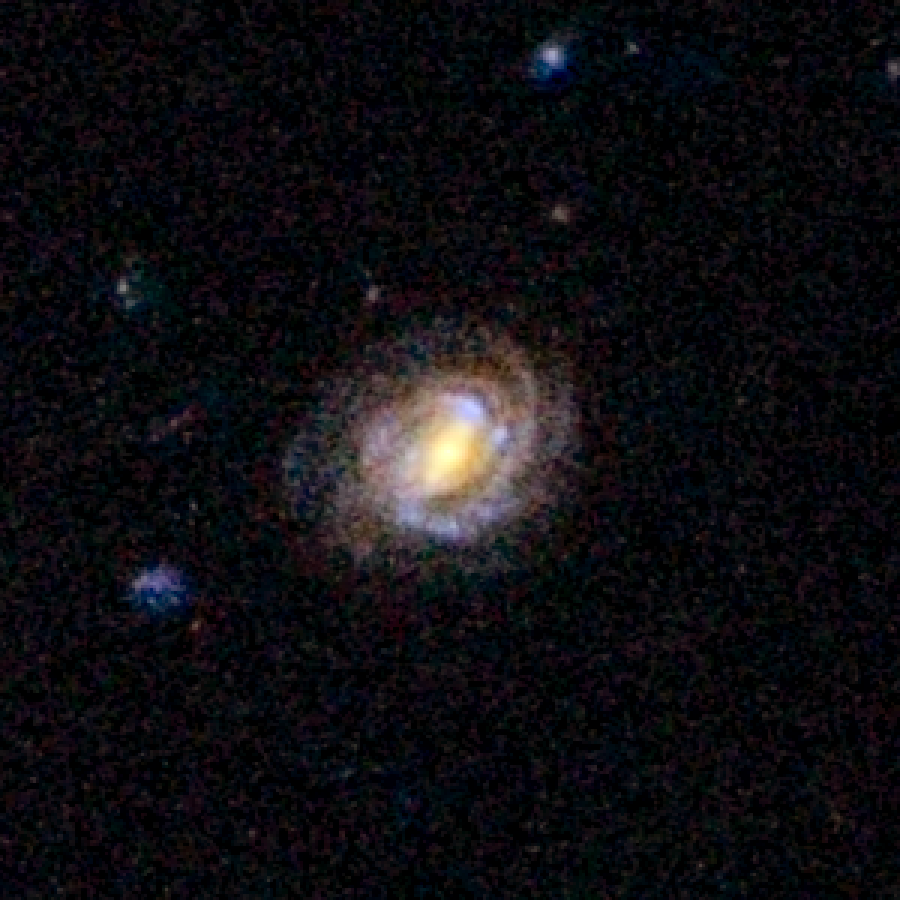

COSMOS Barred Spiral Galaxy 1161898

Barred spiral galaxy 1161898 is located 5.3 billion light-years away from Earth. The galaxy is part of a landmark study of more than 2,000 spiral galaxies from the largest galaxy census conducted by the Advanced Camera for Surveys aboard the NASA/ESA Hubble Space Telescope. The observations are part of the Cosmic Evolution Survey (COSMOS). Astronomers assembled this image from observations taken between fall 2003 and spring 2005 with Hubble and the Subaru Telescope in Mauna Kea, Hawaii.

Credit: NASA, ESA, K. Sheth (Spitzer Science Center, California Institute of Technology, Pasadena, California), and P. Capak and N. Scoville (California Institute of Technology)